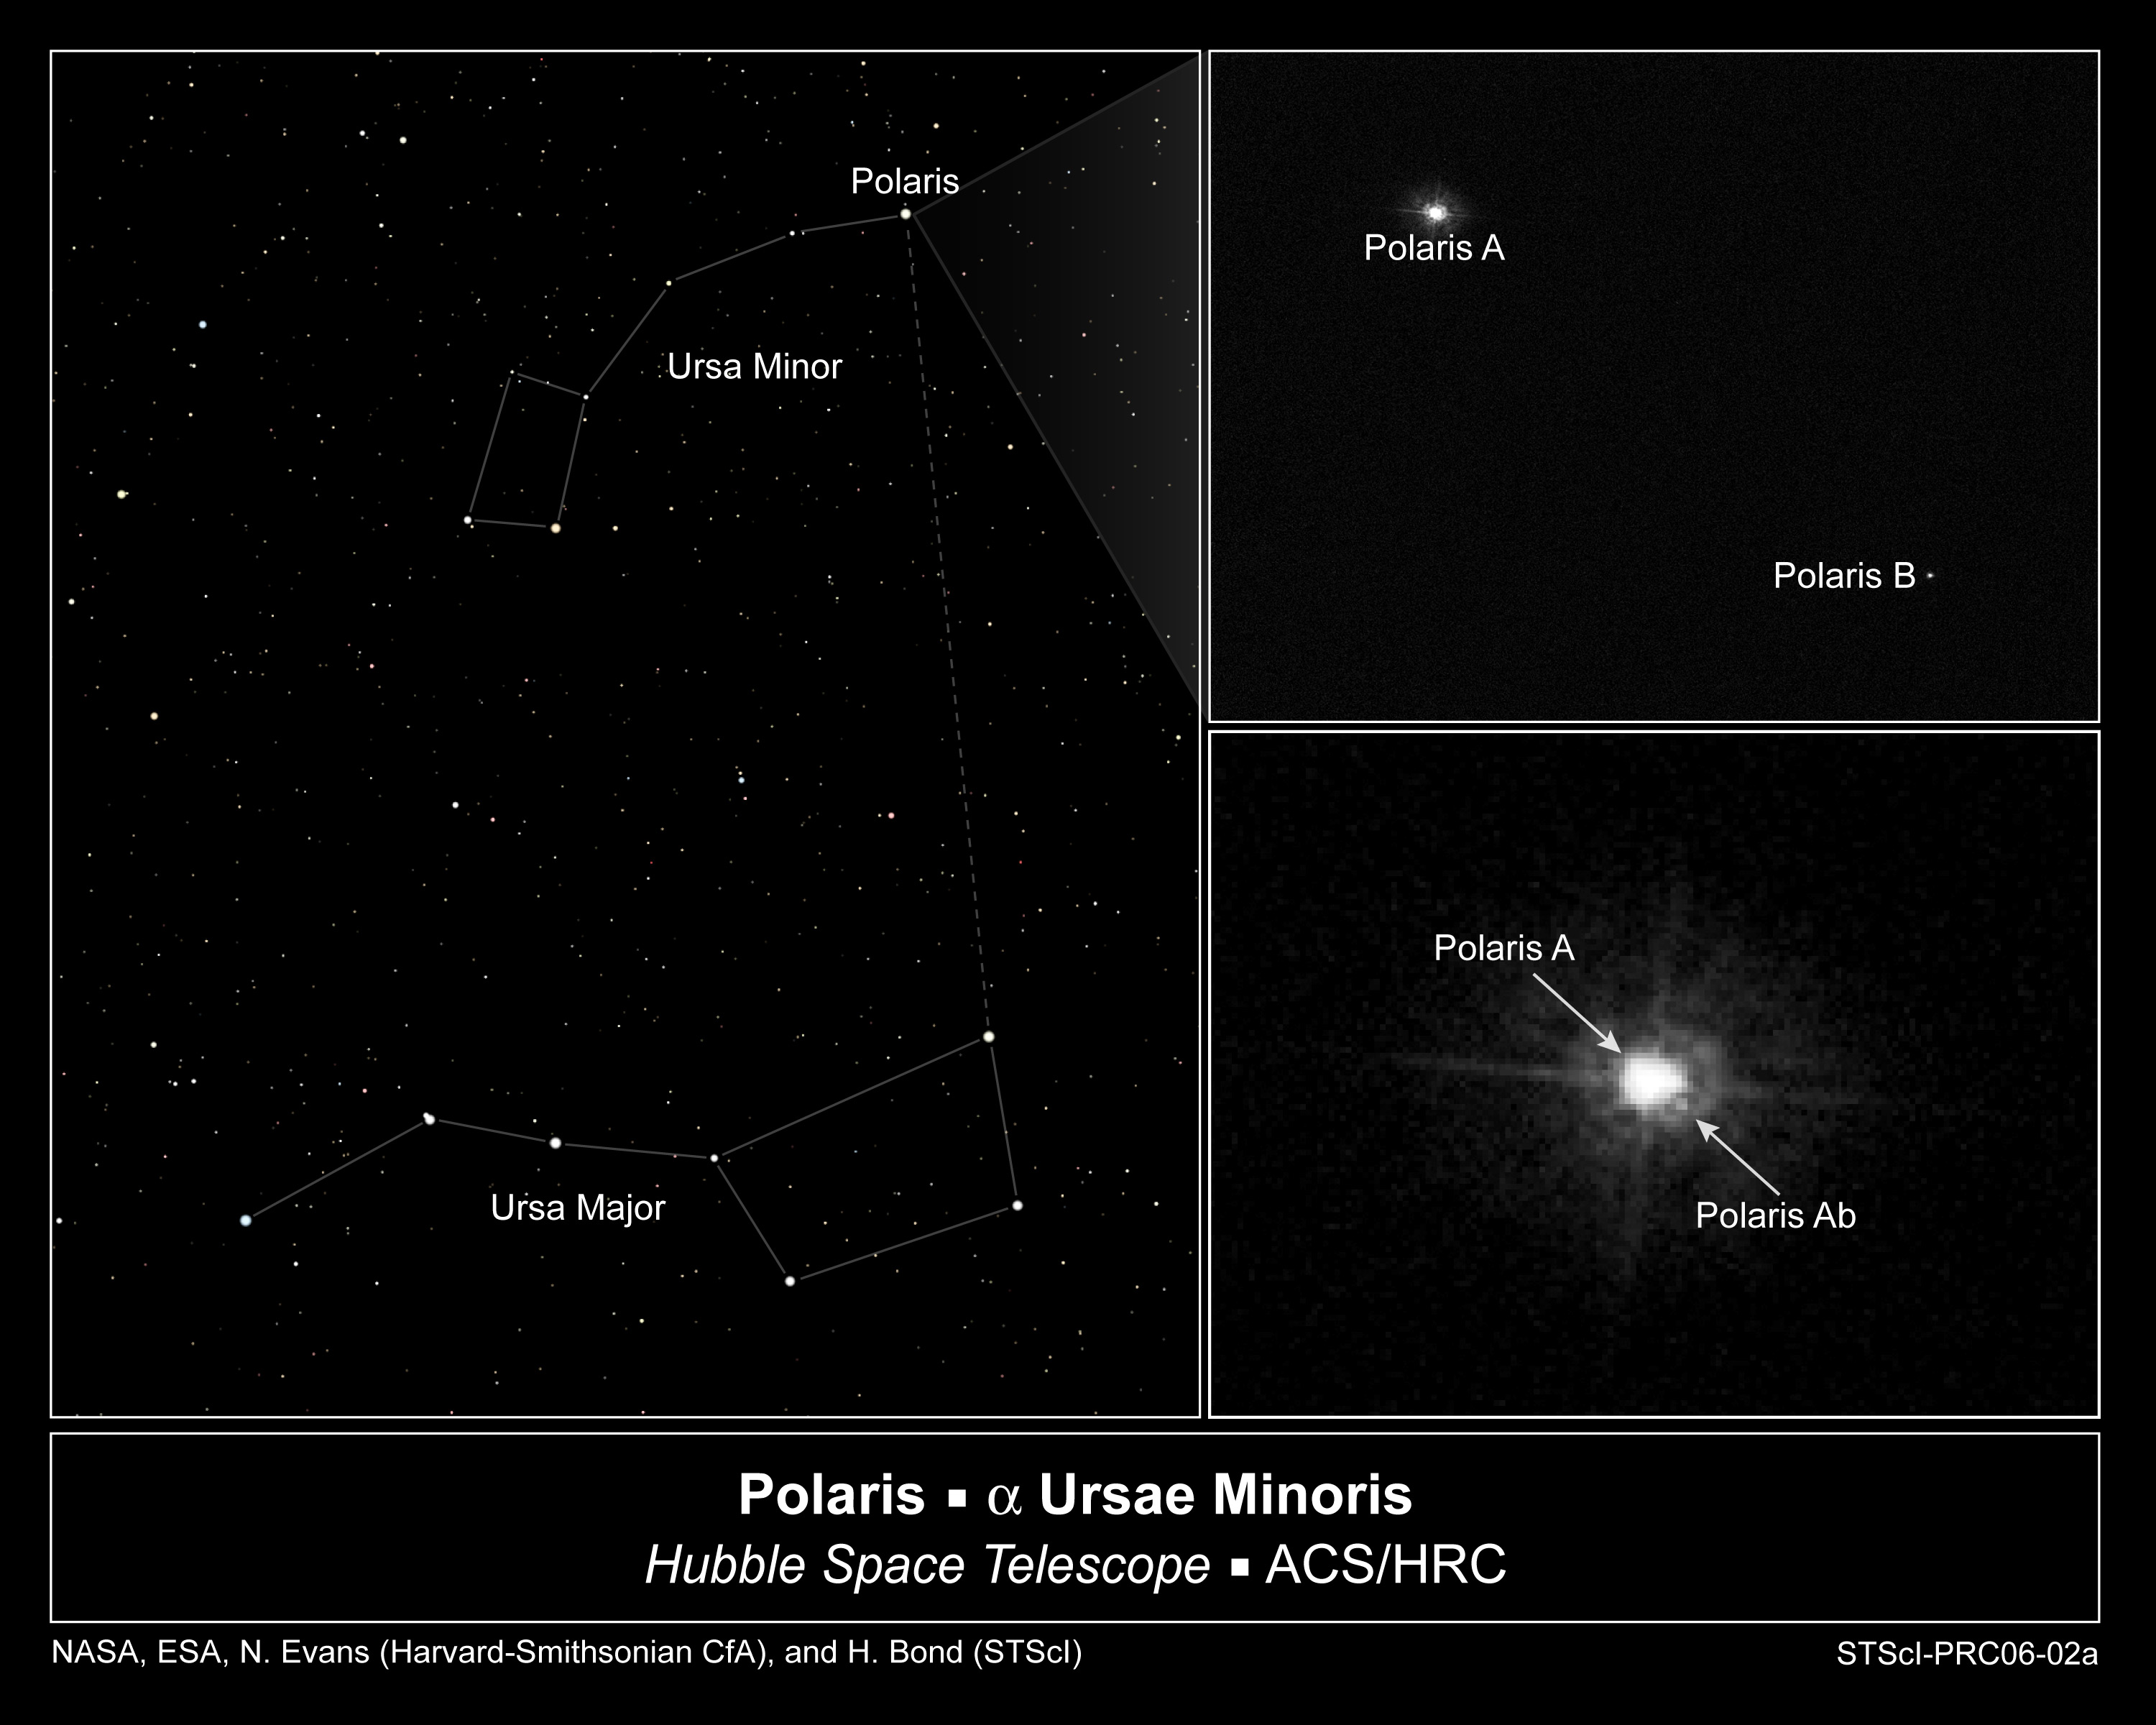

Hubble Images Polaris's Companion

This sequence of images shows that the North Star, Polaris is really a triple star system.

For the first time, the close companion of Polaris has been seen directly.

The left frame shows Polaris's location very close to the position of Earth's north celestial pole in Ursa Minor (the Small Bear).

Credit: NASA, ESA, N. Evans (Harvard-Smithsonian CfA), and H. Bond (STScI)